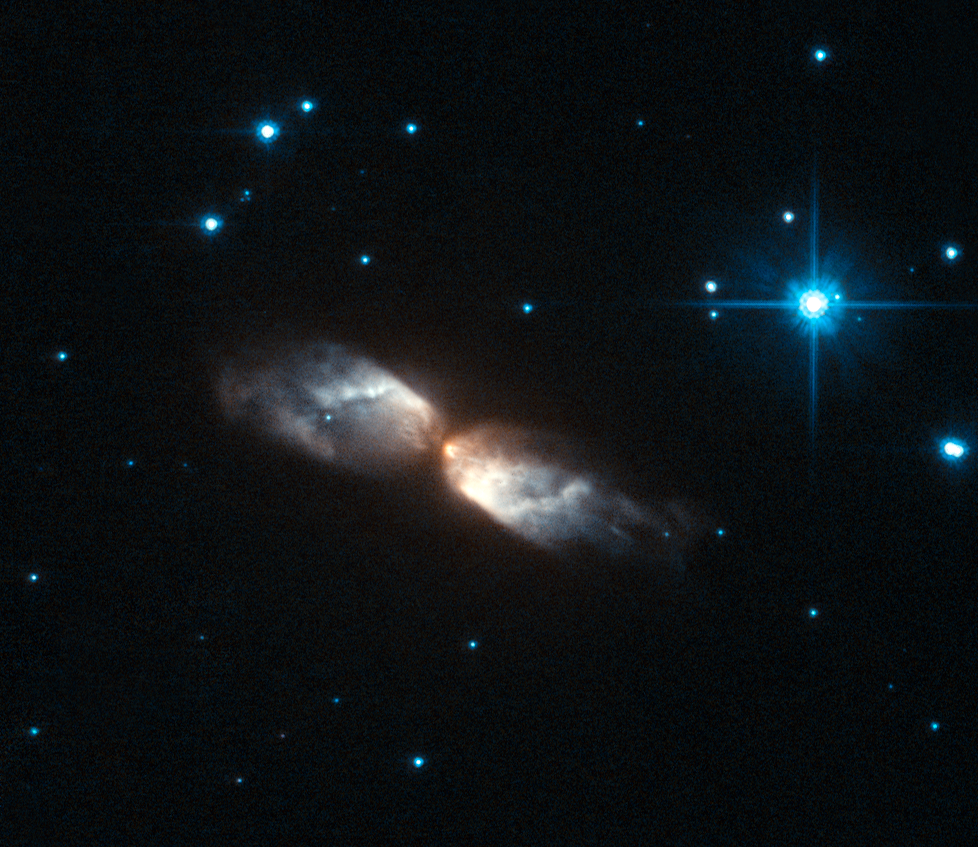

Hubble witnesses the crafting of a celestial masterpiece

The NASA/ESA Hubble Space Telescope has used its Advanced Camera for Surveys to peer closely at the strange cloud of gas and dust that envelops a star at a late stage in its life, a short-lived phenomenon known as a protoplanetary, or pre-planetary nebula. These fascinating celestial objects give astronomers an opportunity to watch the early stages of planetary nebula formation, as the gas and dust is moulded by high velocity winds — like watching a glassblower at work in his factory.

Despite their rather confusing names, these objects are unrelated to planets. The name arose because of the superficial visual similarity between planetary nebulae and the small discs of the outer planets in the Solar System when viewed through a telescope.

The protoplanetary nebula shown in this image is known as IRAS 20068+4051 and it is found in the constellation of Cygnus. The shell formed when its progenitor star exhausted its hydrogen fuel for nuclear fusion, causing the outer layers of the star to expand and cool, which created a spherical envelope of gas and dust around the star. The mechanism that drives high velocity winds to then shape this spherical envelope into the intricate structure that we see here is still unclear, which is why continued observation of protoplanetary nebulae is so important.

Meanwhile, as the central star continues to evolve, finding new ways to prevent itself from collapsing under its own gravity, it will eventually become hot enough to make the gas glow as a spectacular planetary nebula. These objects emit a broad spectrum of radiation, including visible light, making them great targets for both amateur and professional astronomers.

However, protoplanetary nebulae, which often appear smaller and are seen best in infrared light, are much trickier to observe, particularly since water vapour in the Earth’s atmosphere absorbs most infrared wavelengths. But Hubble has exceptionally sharp vision and an unobstructed vantage point in space, making it possible to capture stunning images of these peculiar objects.

This picture was created from images taken through yellow (F606W, coloured blue) and near-infrared (F814W, coloured red) filters using the High Resolution Channel of Hubble’s Advanced Camera for Surveys. The exposure times were 1280 s (F606W) and 200 s (F814W) and the field of view spans about 25 arcseconds.

Credit: ESA/Hubble & NASA